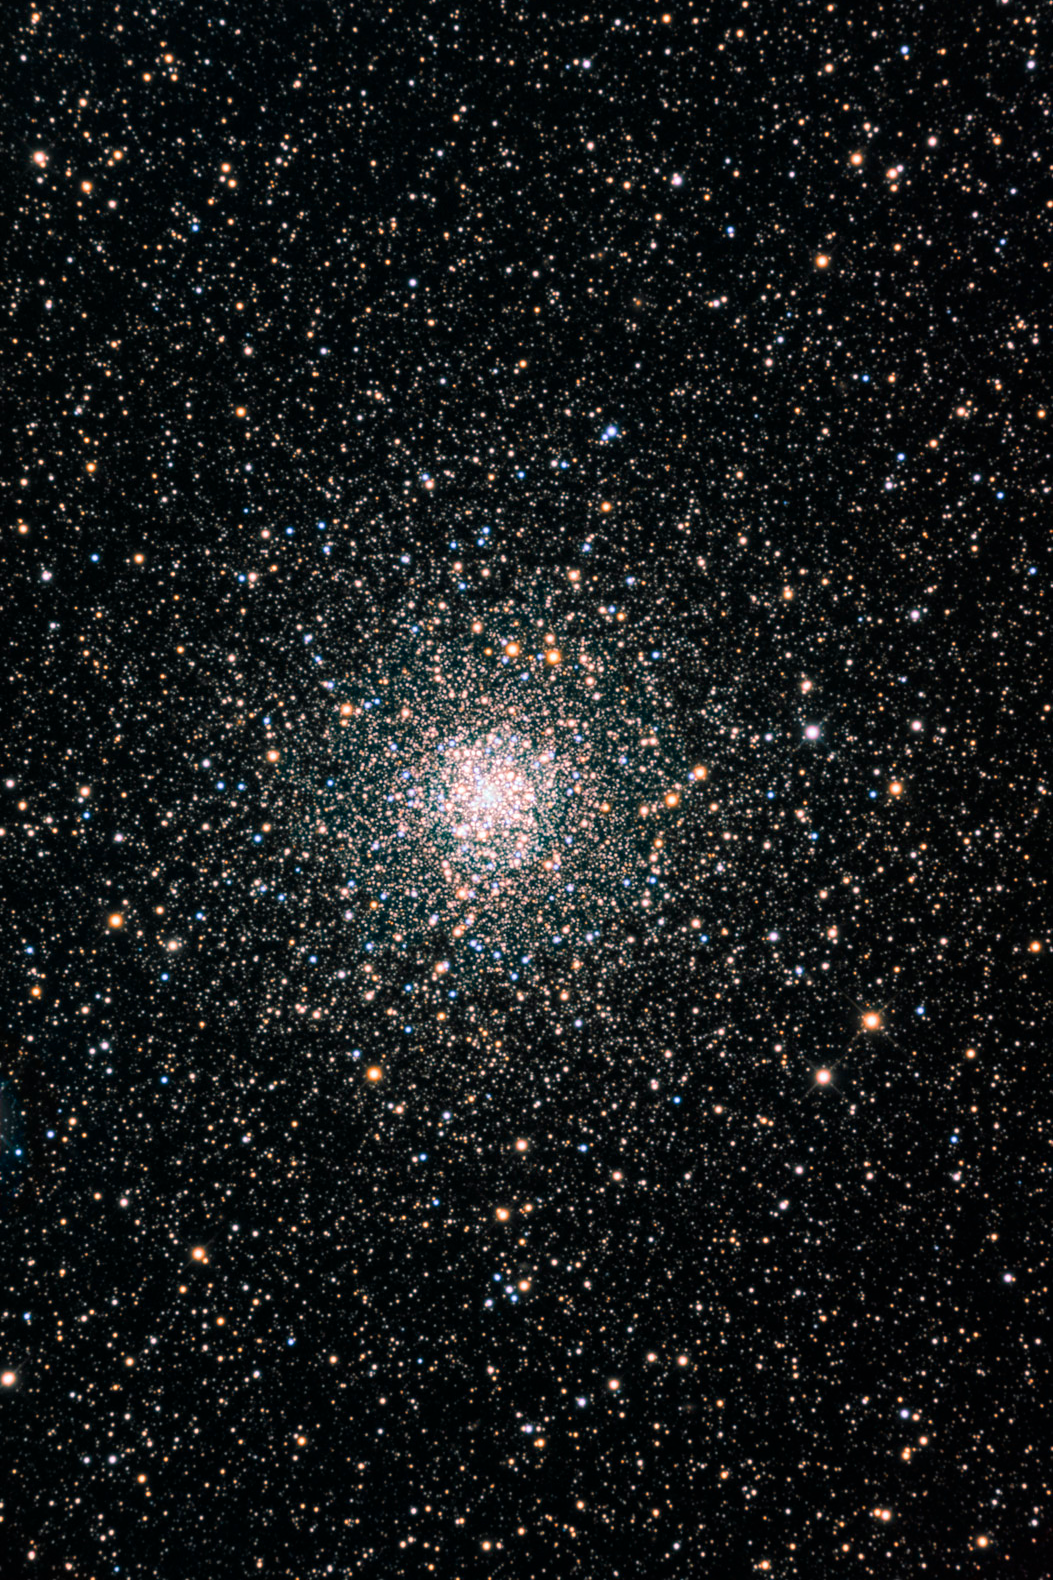

Ground-based Image of Globular Cluster NGC 6397

Ground-based Image of Globular Cluster NGC 6397

Credit: D. Verschatse (Antilhue Observatory, Chile)